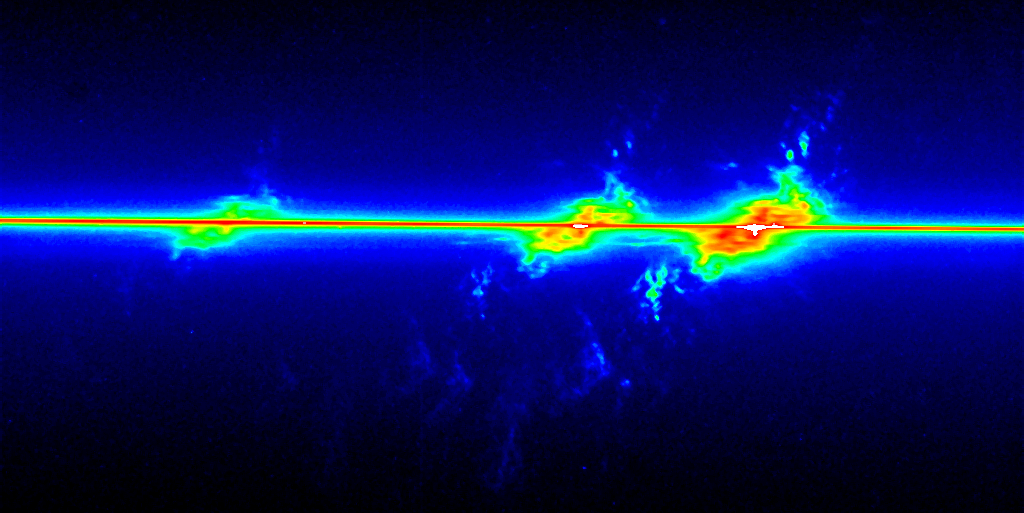

Fireworks near galaxy NGC 4151 (STIS optical)

In this false colour image the two emission lines of oxygen gas (the weaker one at 4959 Angstroms and the stronger one at 5007 Angstroms) are clearly visible. The horizontal line passing through the image is from the light generated by the powerful black hole at the center of NGC 4151.

Credit: John Hutchings (Dominion Astrophysical Observatory), Bruce Woodgate (GSFC/NASA/ESA), Mary Beth Kaiser (Johns Hopkins University), Steven Kraemer(Catholic University of America), and the STIS Team